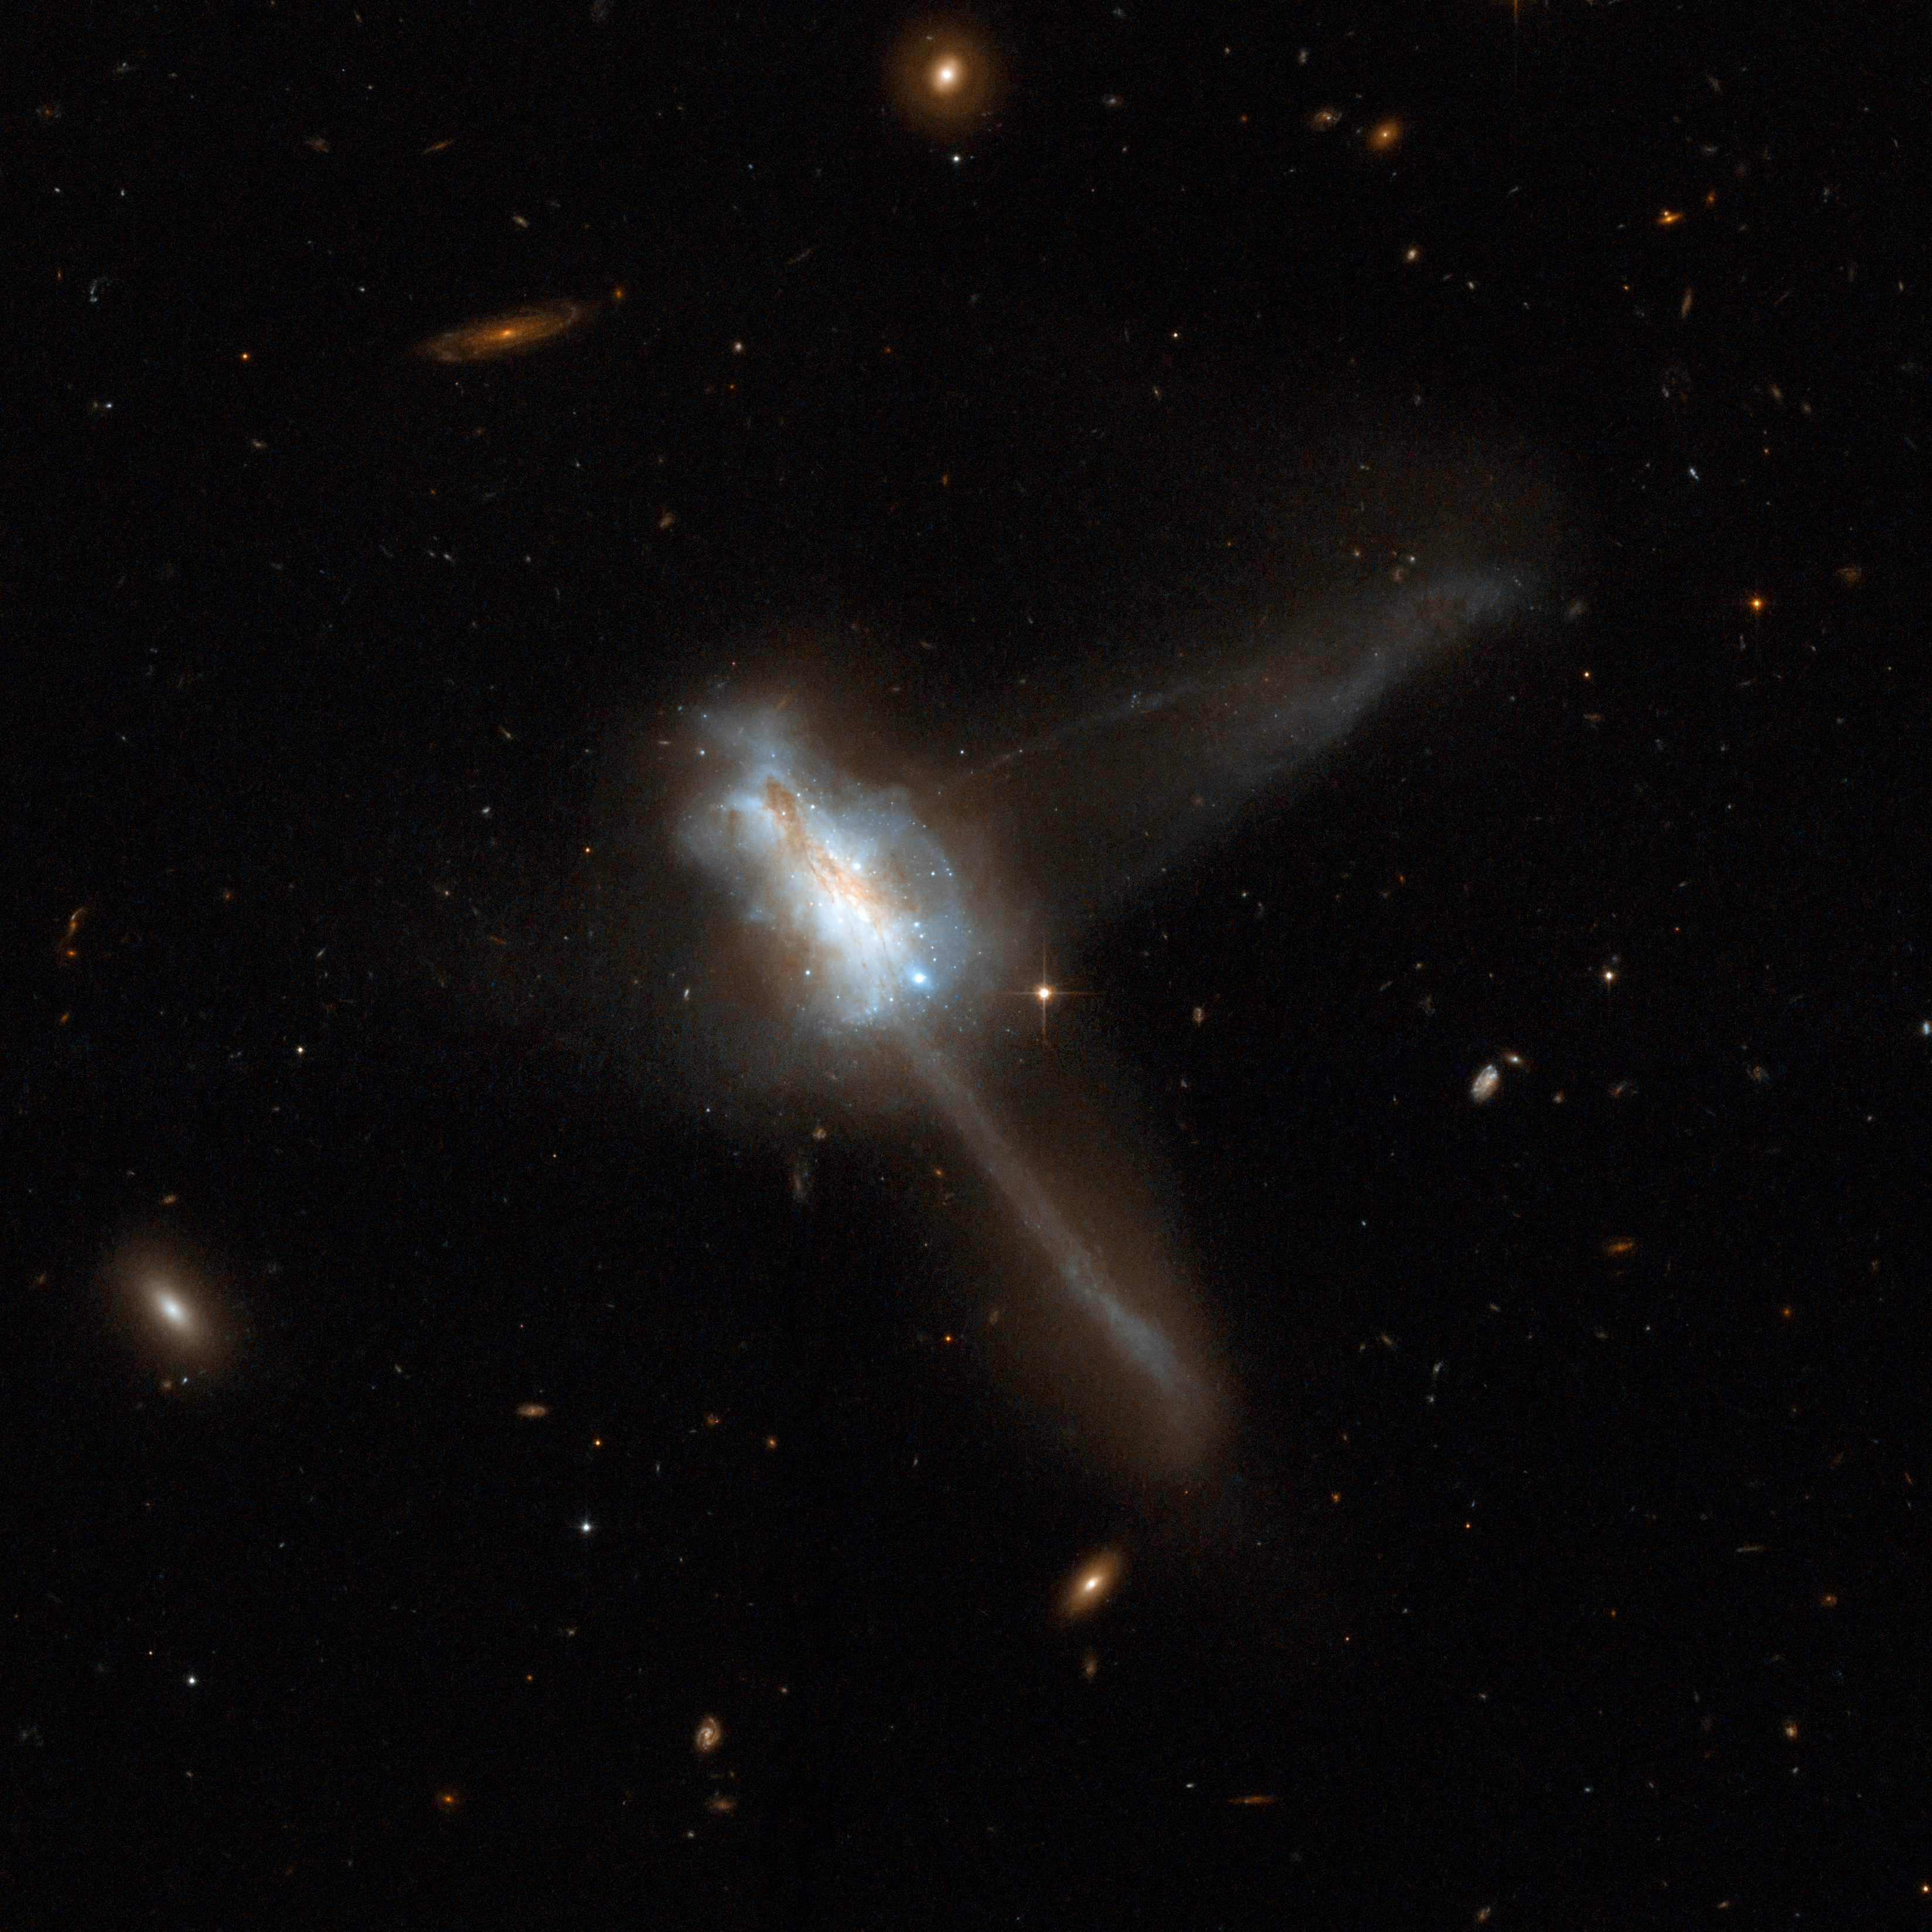

IC 883

IC 883 displays a very disturbed, complex central region with two tidal tails of approximately the same length emerging at nearly right angles: one diagonally to the top right of the frame and the other to the bottom right. The twin tidal tails suggest that IC 883 is the remnant of the merger of two gas-rich disc galaxies. The collision appears to have triggered a burst of star formation, indicated by a number of bright star clusters in the central region. IC 883 is 300 million light-years away toward the constellation of Canes Venatici, the Hunting Dogs. It is Number 193 in Arp's Atlas of Peculiar Galaxies.

This image is part of a large collection of 59 images of merging galaxies taken by the Hubble Space Telescope and released on the occasion of its 18th anniversary on 24th April 2008.

Credit: NASA, ESA, the Hubble Heritage Team (STScI/AURA)-ESA/Hubble Collaboration and A. Evans (University of Virginia, Charlottesville/NRAO/Stony Brook University)